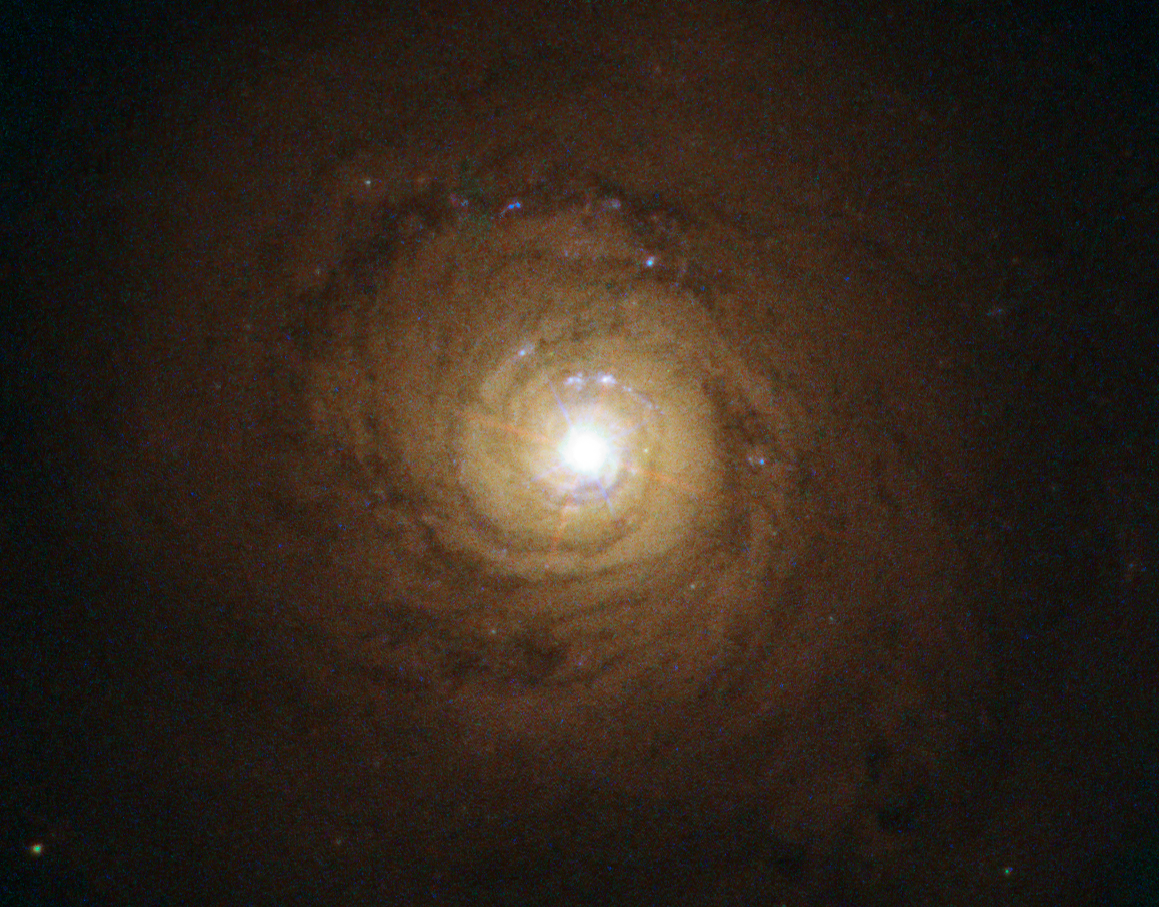

Supermassive black hole at the heart of NGC 5548

This is the galaxy known as NGC 5548. At its heart, though not visible here, is a supermassive black hole behaving in a strange and unexpected manner. Researchers detected a clumpy gas stream flowing quickly outwards and blocking 90 percent of the X-rays emitted by the black hole. This activity could provide insights into how supermassive black holes interact with their host galaxies.

Credit: ESA/Hubble and NASA. Acknowledgement: Davide de Martin.